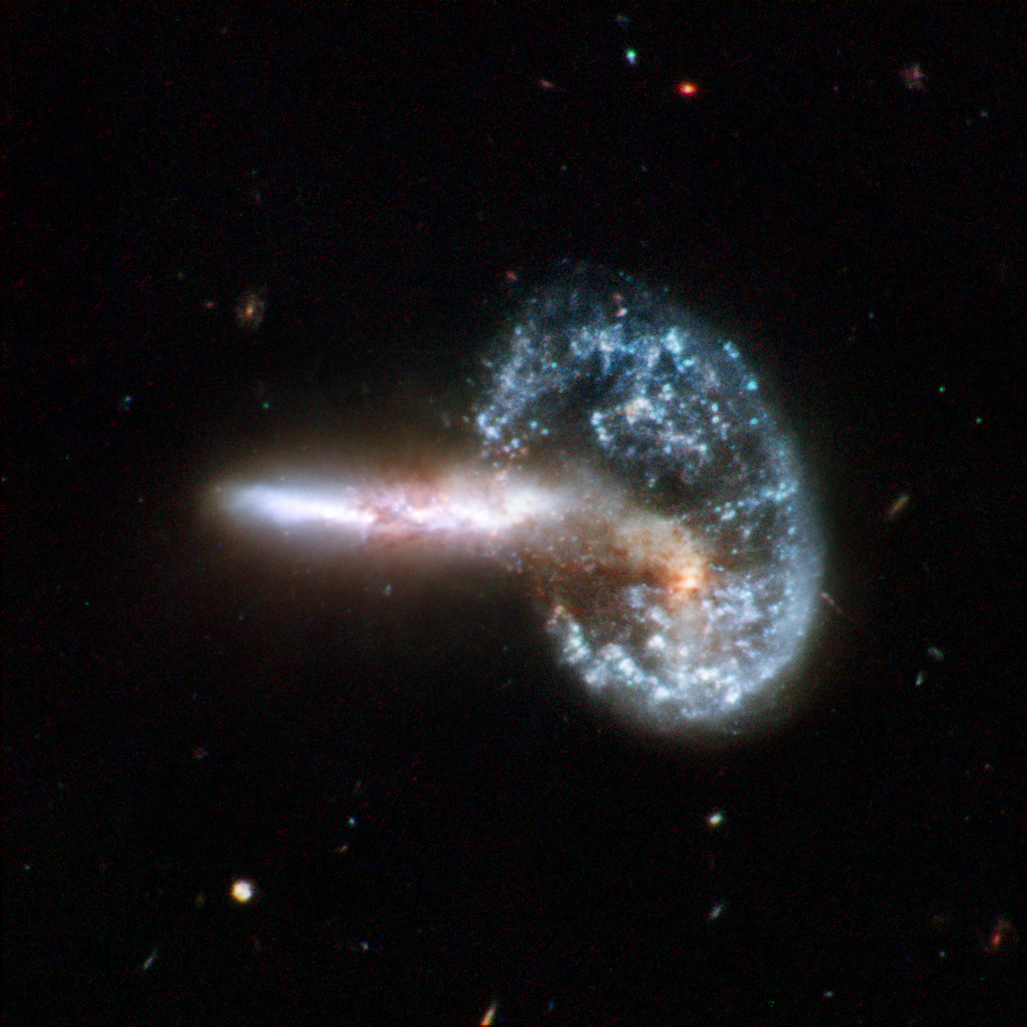

Arp 148

Arp 148 is the staggering aftermath of an encounter between two galaxies, resulting in a ring-shaped galaxy and a long-tailed companion. The collision between the two parent galaxies produced a shockwave effect that first drew matter into the centre and then caused it to propagate outwards in a ring. The elongated companion perpendicular to the ring suggests that Arp 148 is a unique snapshot of an ongoing collision. Infrared observations reveal a strong obscuration region that appears as a dark dust lane across the nucleus in optical light.

Arp 148 is nicknamed "Mayall's object" and is located in the constellation of Ursa Major, the Great Bear, approximately 500 million light-years away. This interacting pair of galaxies is included in Arp's catalogue of peculiar galaxies as number 148.

This image is part of a large collection of 59 images of merging galaxies taken by the Hubble Space Telescope and released on the occasion of its 18th anniversary on 24th April 2008.

Credit: NASA, ESA, the Hubble Heritage Team (STScI/AURA)-ESA/Hubble Collaboration and A. Evans (University of Virginia, Charlottesville/NRAO/Stony Brook University), K. Noll (STScI), and J. Westphal (Caltech)